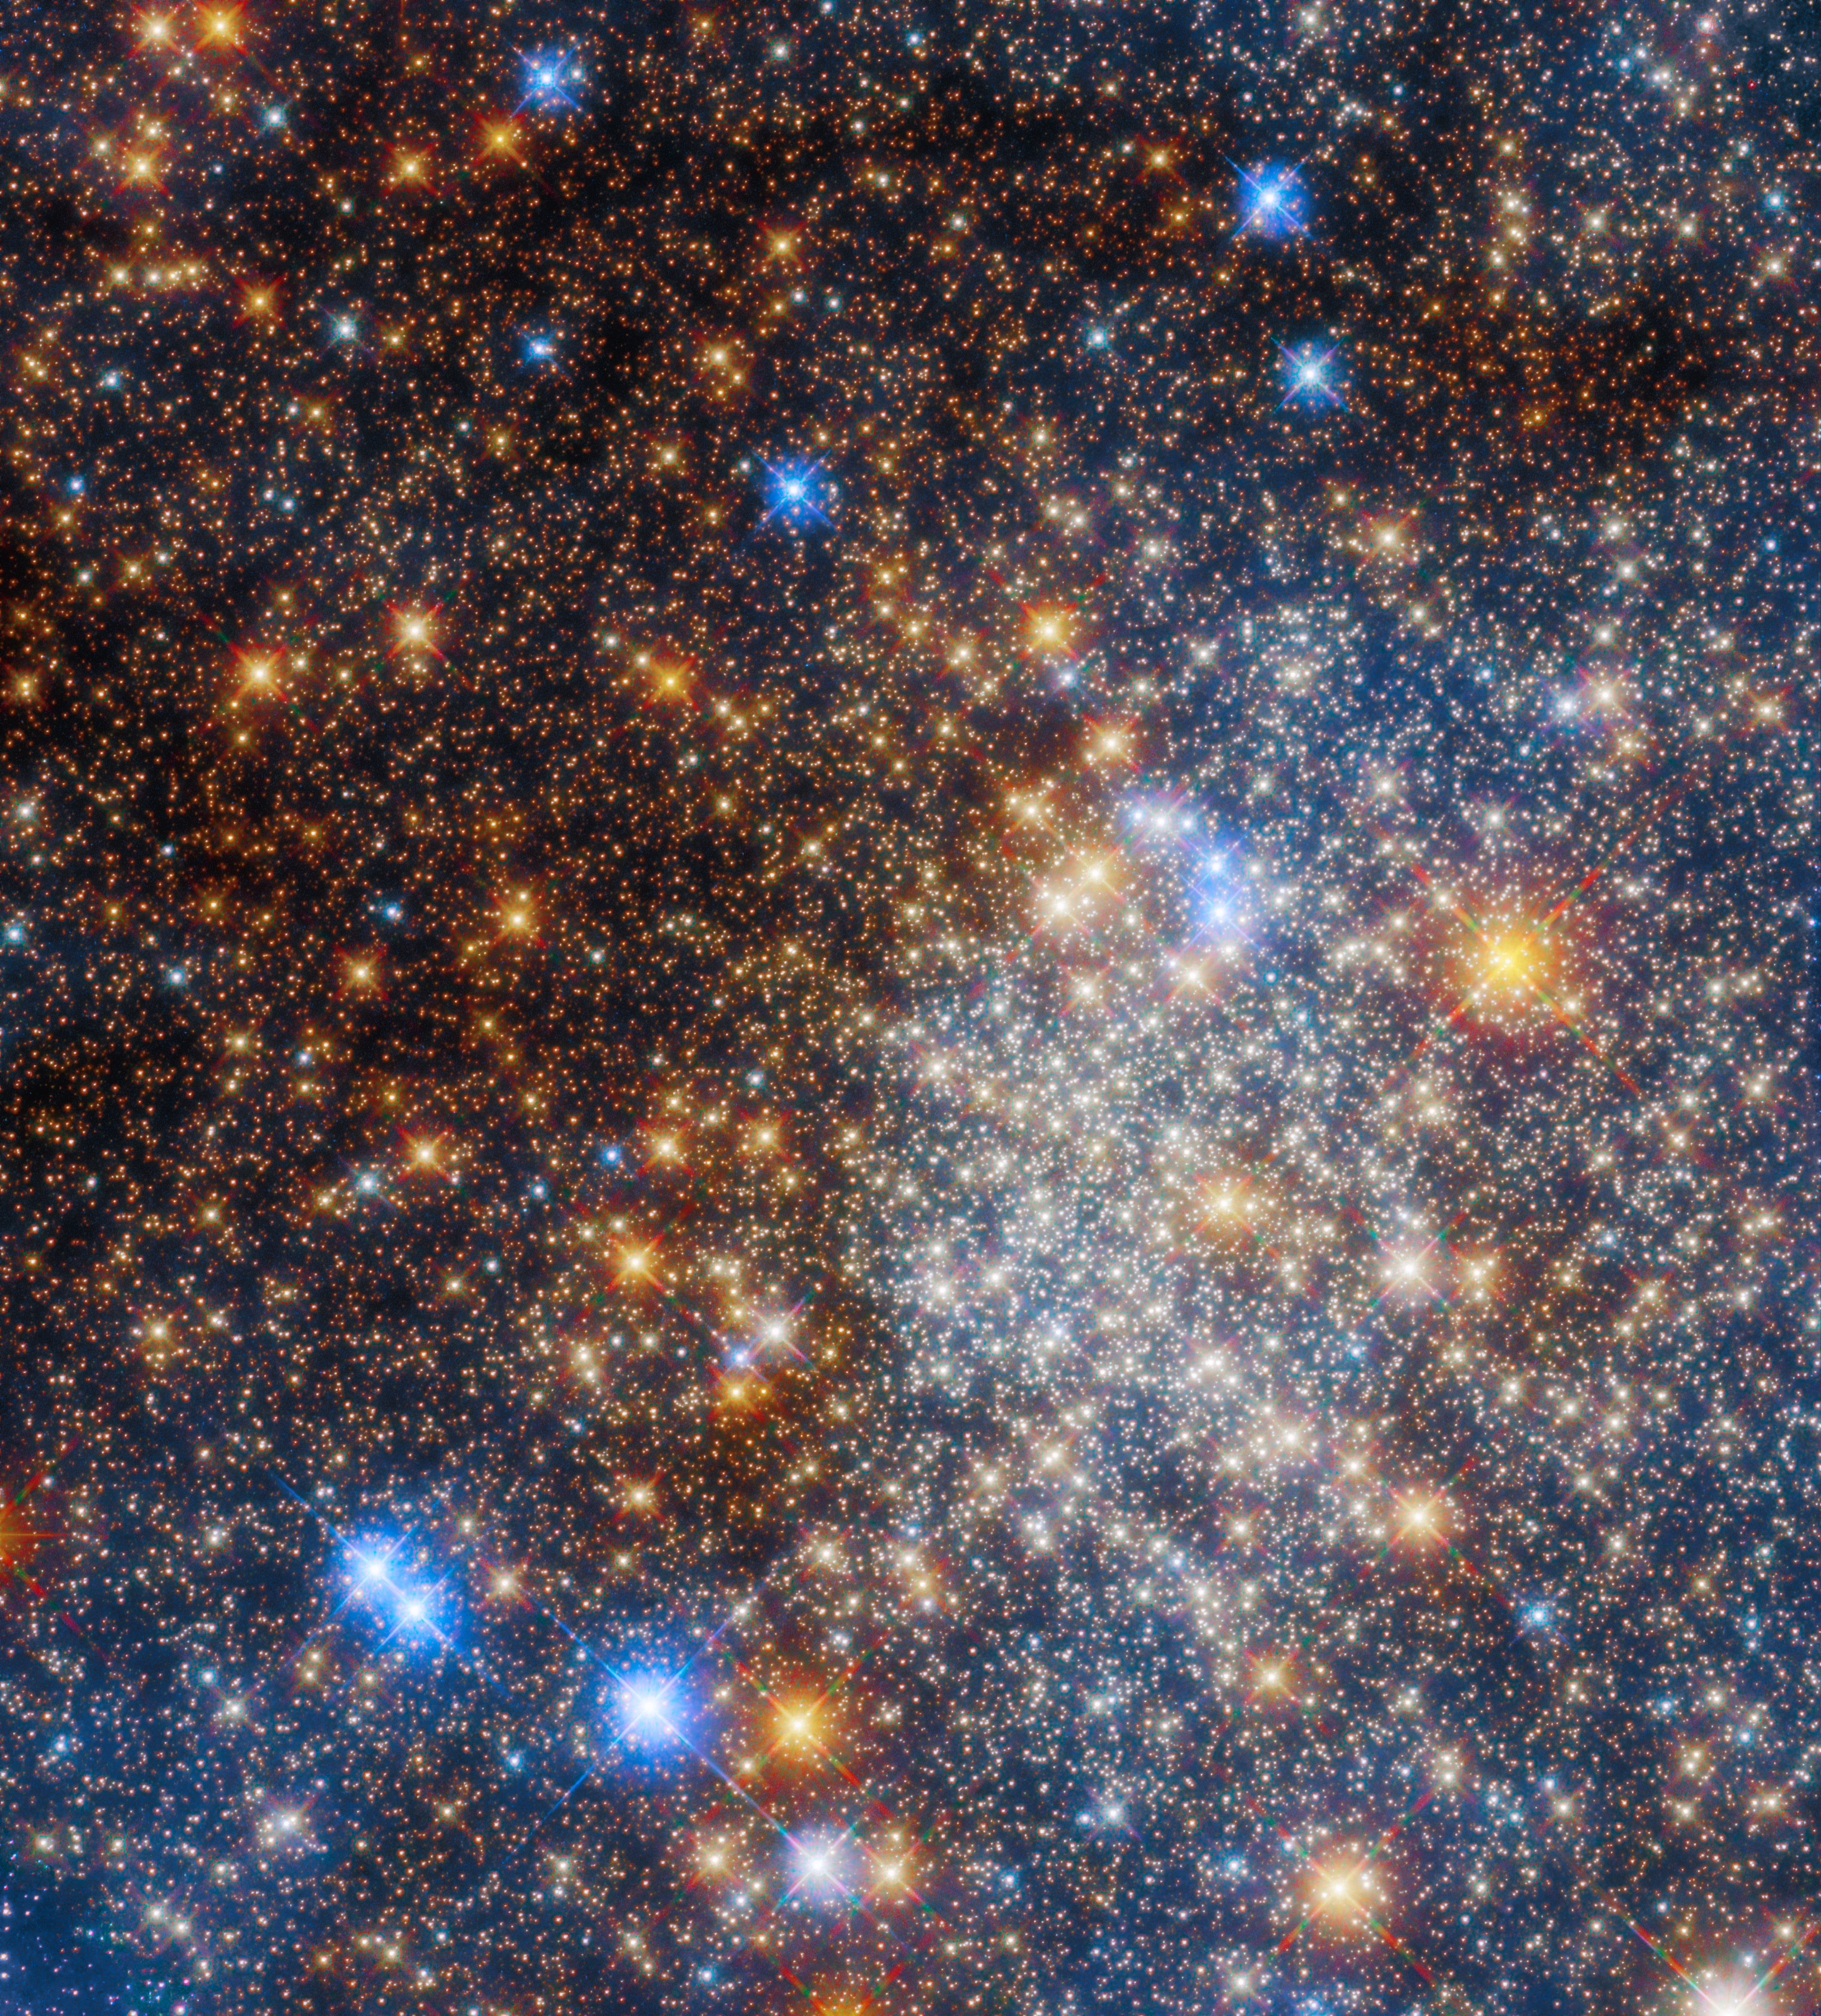

Glittering globular cluster Terzan 12

The glittering globular cluster Terzan 12 — a vast, tightly bound collection of stars — fills the frame of this image from the NASA/ESA Hubble Space Telescope. This star-studded stellar census comes from a string of observations that aim to systematically explore globular clusters located towards the centre of our galaxy, such as this one in the constellation Sagittarius. The locations of these globular clusters — deep in the Milky Way galaxy — mean that they are shrouded in gas and dust, which can block or alter the wavelengths of starlight emanating from the clusters.

Here, astronomers were able to sidestep the effect of gas and dust by comparing the new observations made with the razor-sharp vision of Hubble's Advanced Camera for Surveys and Wide-Field Camera 3 with pre-existing images. Their observations should shed light on the relation between age and composition in the Milky Way’s innermost globular clusters.

Credit: ESA/Hubble & NASA, R. Cohen (Rutgers University)